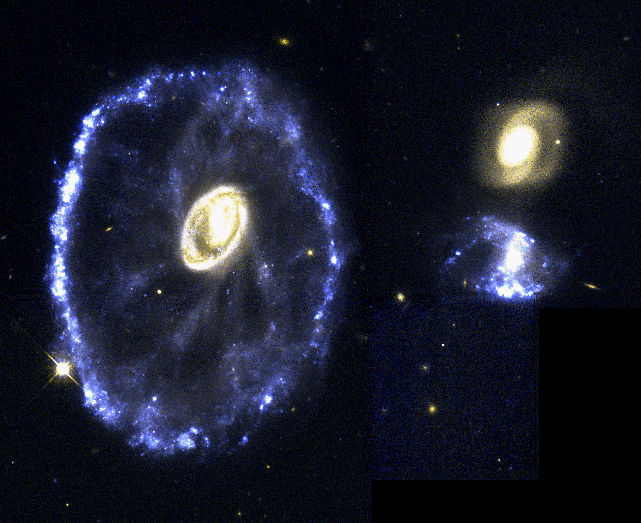

The Cartwheel Galaxy

A rare and spectacular head-on collision between two galaxies appears in this Hubble Space Telescope true-color image of the Cartwheel Galaxy, located 500 million light-years away in the constellation Sculptor. The new details of star birth resolved by Hubble provide an opportunity to study how extremely massive stars are born in large fragmented gas clouds.

Credit: Kirk Borne (ST ScI), and NASA/ESA